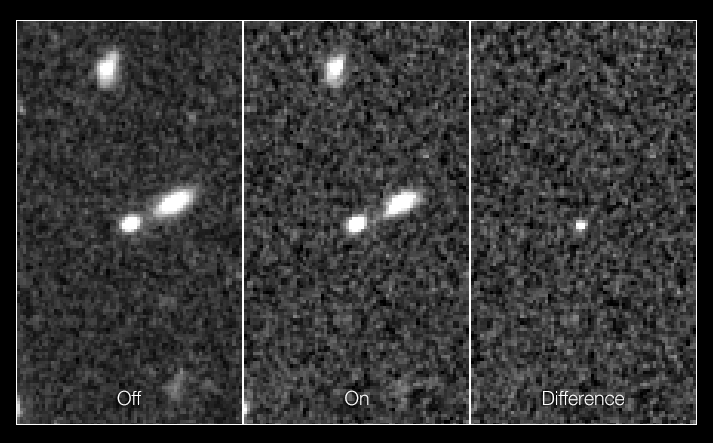

Record-breaking supernova in the CANDELS Ultra Deep Survey: before, after, and difference

These three frames show the supernova dubbed SN UDS10Wil, or SN Wilson, the most distant Type Ia supernova ever detected.

The discovery was part of a three-year Hubble program begun in 2010, called the CANDELS+CLASH Supernova Project. This program aimed to survey faraway Type Ia supernovae to determine their distances and see if they have changed over the 13.8 billion years since the Big Bang, using the sharpness and versatility of Hubble’s Wide Field Camera 3.

The leftmost frame in this image shows just the supernova’s host galaxy, before the violent explosion. The middle frame shows the galaxy after the supernova had gone off, and the third frame indicates the brightness of the supernova alone.

Credit: NASA, ESA, A. Riess (STScI and JHU), and D. Jones and S. Rodney (JHU)